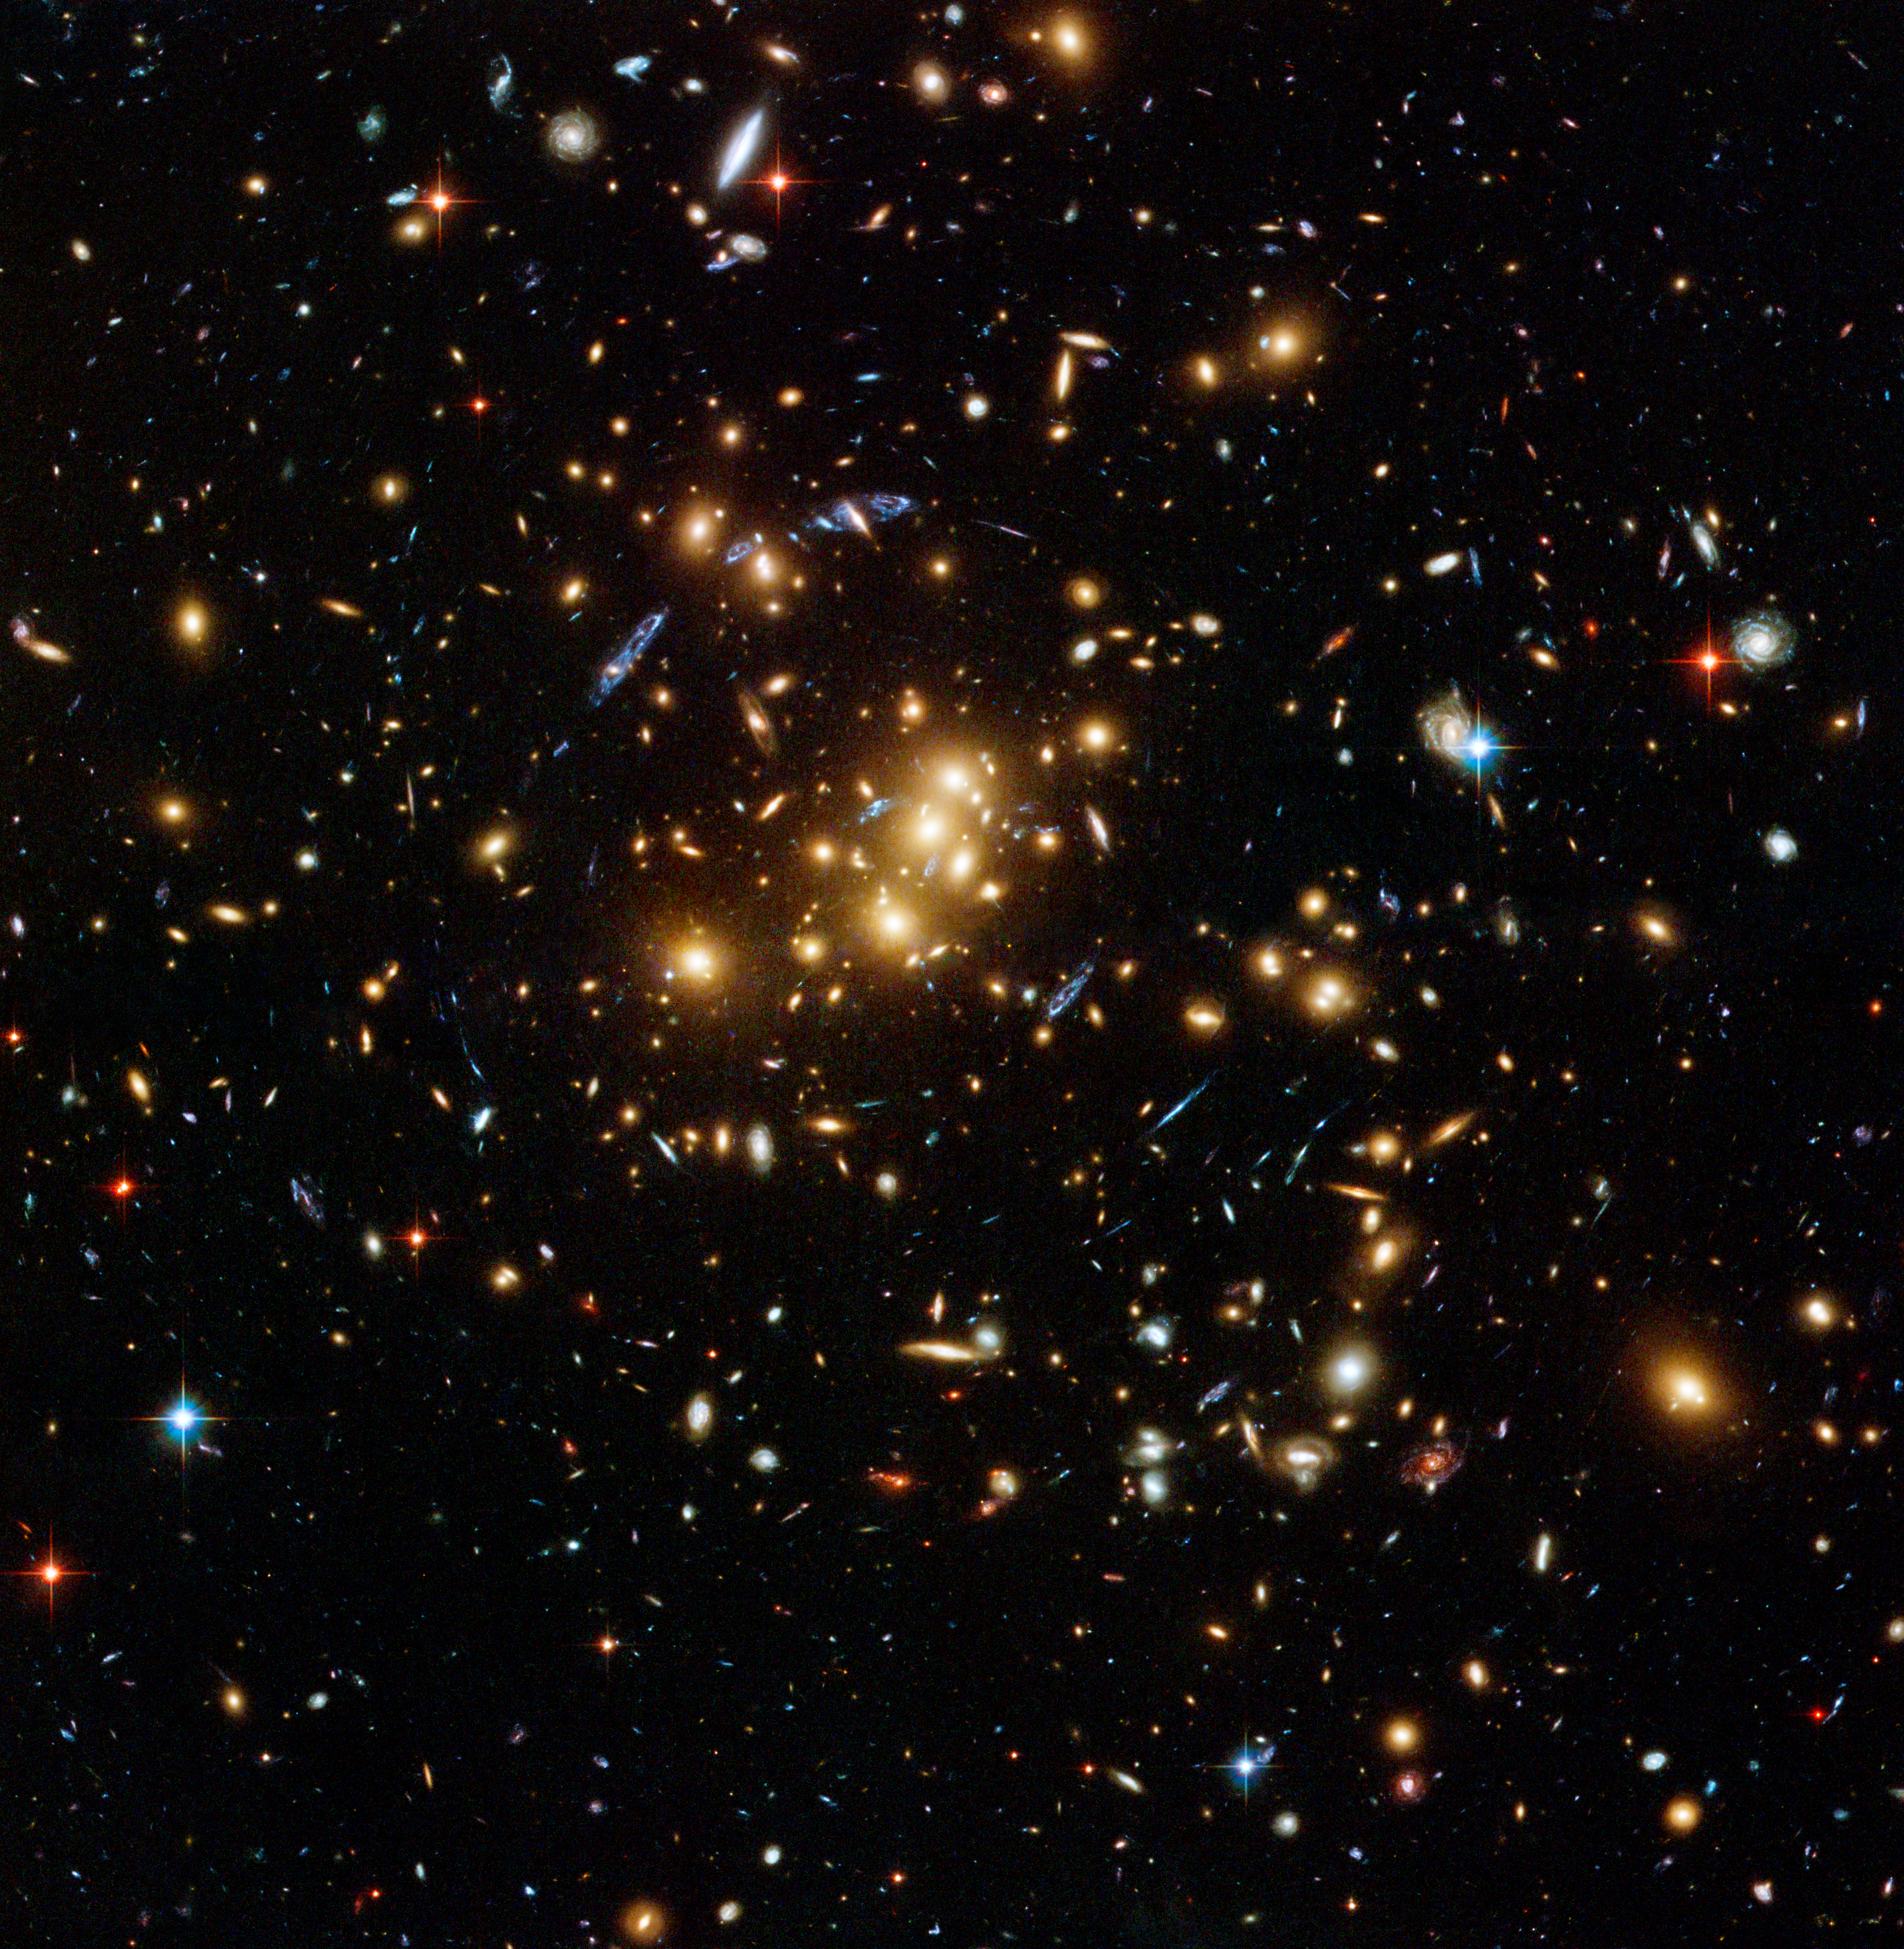

Hubble finds dark matter ring in galaxy cluster

An international team of astronomers using the NASA/ESA Hubble Space Telescope has discovered a ghostly ring of dark matter that was formed long ago during a titanic collision between two massive galaxy clusters. It is the first time that a dark matter distribution has been found that differs substantially from the distribution of ordinary matter.

This image shows the galaxy cluster Cl 0024+17 (ZwCl 0024+1652) as seen by Hubble's Advanced Camera for Surveys. The image displays faint faraway background galaxies that had their light bent by the cluster's strong gravitational field. By mapping the distorted light and using it to deduce how dark matter is distributed in the cluster, astronomers spotted the ring of dark matter. One of the background galaxies is located about two times further away than the yellow cluster galaxies in the foreground, and has been multiple-imaged into five separate arc-shaped components, seen in blue.

Credit: NASA, ESA, M.J. Jee and H. Ford (Johns Hopkins University)